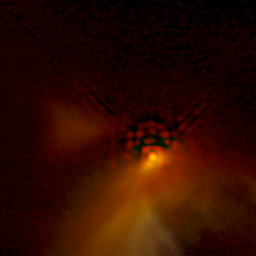

NICMOS Peers Through Dust to Reveal Young Stellar Disks. A View of IRAS 04016+2610

A very young star still deep within the dusty cocoon from which it formed is shown in this image of IRAS 04016+2610. The star is visible as a bright reddish spot at the base of a bowl-shaped nebula about 100 billion miles (about 160 billion kilometres) across at the widest point. The nebula arises from dusty material falling onto a forming circumstellar disk, seen as a partial dark band to the left of the star. The necklace of bright spots above the star is an image artifact.

Credit: D. Padgett (IPAC/Caltech), W. Brandner (IPAC), K. Stapelfeldt (JPL) and NASA/ESA